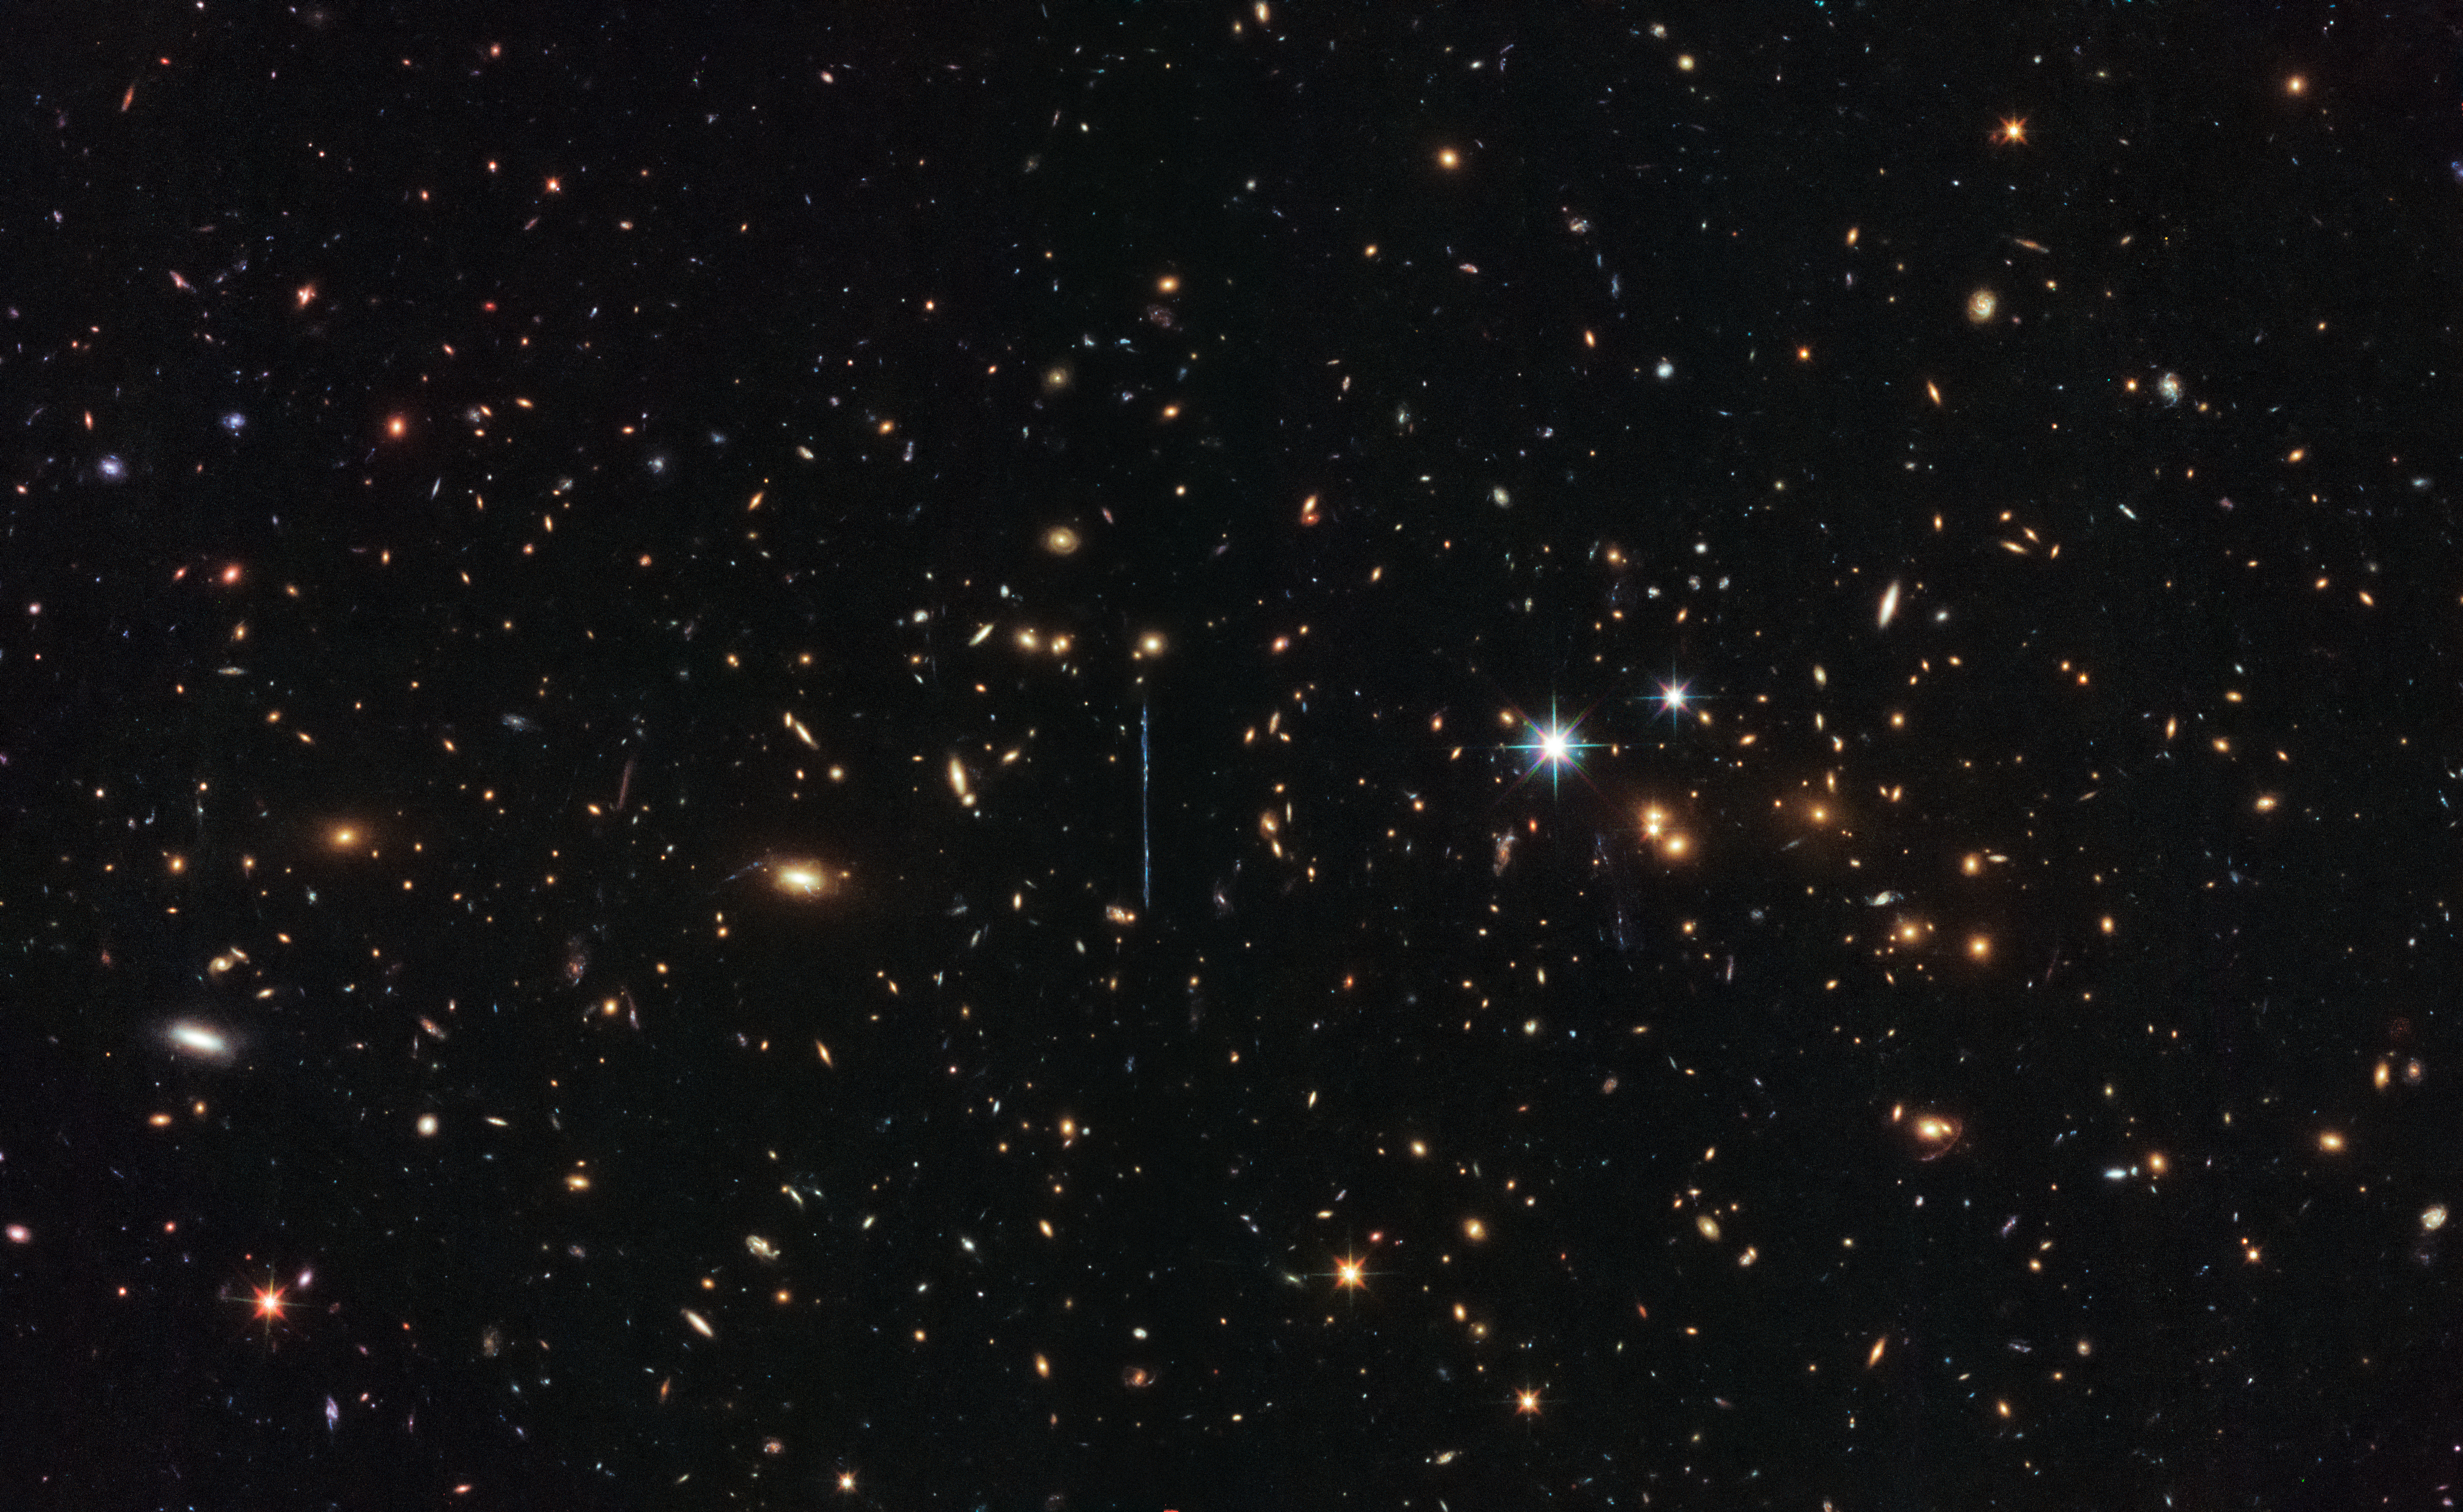

A gargantuan collision

In 2014, astronomers using the NASA/ESA Hubble Space Telescope found that this enormous galaxy cluster contains the mass of a staggering three million billion Suns — so it’s little wonder that it has earned the nickname of “El Gordo” (“the Fat One” in Spanish)! Known officially as ACT-CLJ0102-4915, it is the largest, hottest, and X-ray brightest galaxy cluster ever discovered in the distant Universe.

Galaxy clusters are the largest objects in the Universe that are bound together by gravity. They form over billions of years as smaller groups of galaxies slowly come together. In 2012, observations from ESO’s Very Large Telescope, NASA’s Chandra X-ray Observatory and the Atacama Cosmology Telescope showed that El Gordo is actually composed of two galaxy clusters colliding at millions of kilometres per hour.

The formation of galaxy clusters depends heavily on dark matter and dark energy; studying such clusters can therefore help shed light on these elusive phenomena. In 2014, Hubble found that most of El Gordo’s mass is concealed in the form of dark matter. Evidence suggests that El Gordo’s “normal” matter — largely composed of hot gas that is bright in the X-ray wavelength domain — is being torn from the dark matter in the collision. The hot gas is slowing down, while the dark matter is not.

This image was taken by Hubble’s Advanced Camera for Surveys and Wide-Field Camera 3 as part of an observing programme called RELICS (Reionization Lensing Cluster Survey). RELICS imaged 41 massive galaxy clusters with the aim of finding the brightest distant galaxies for the forthcoming NASA/ESA/CSA James Webb Space Telescope (JWST) to study.

Credit: ESA/Hubble & NASA, RELICS